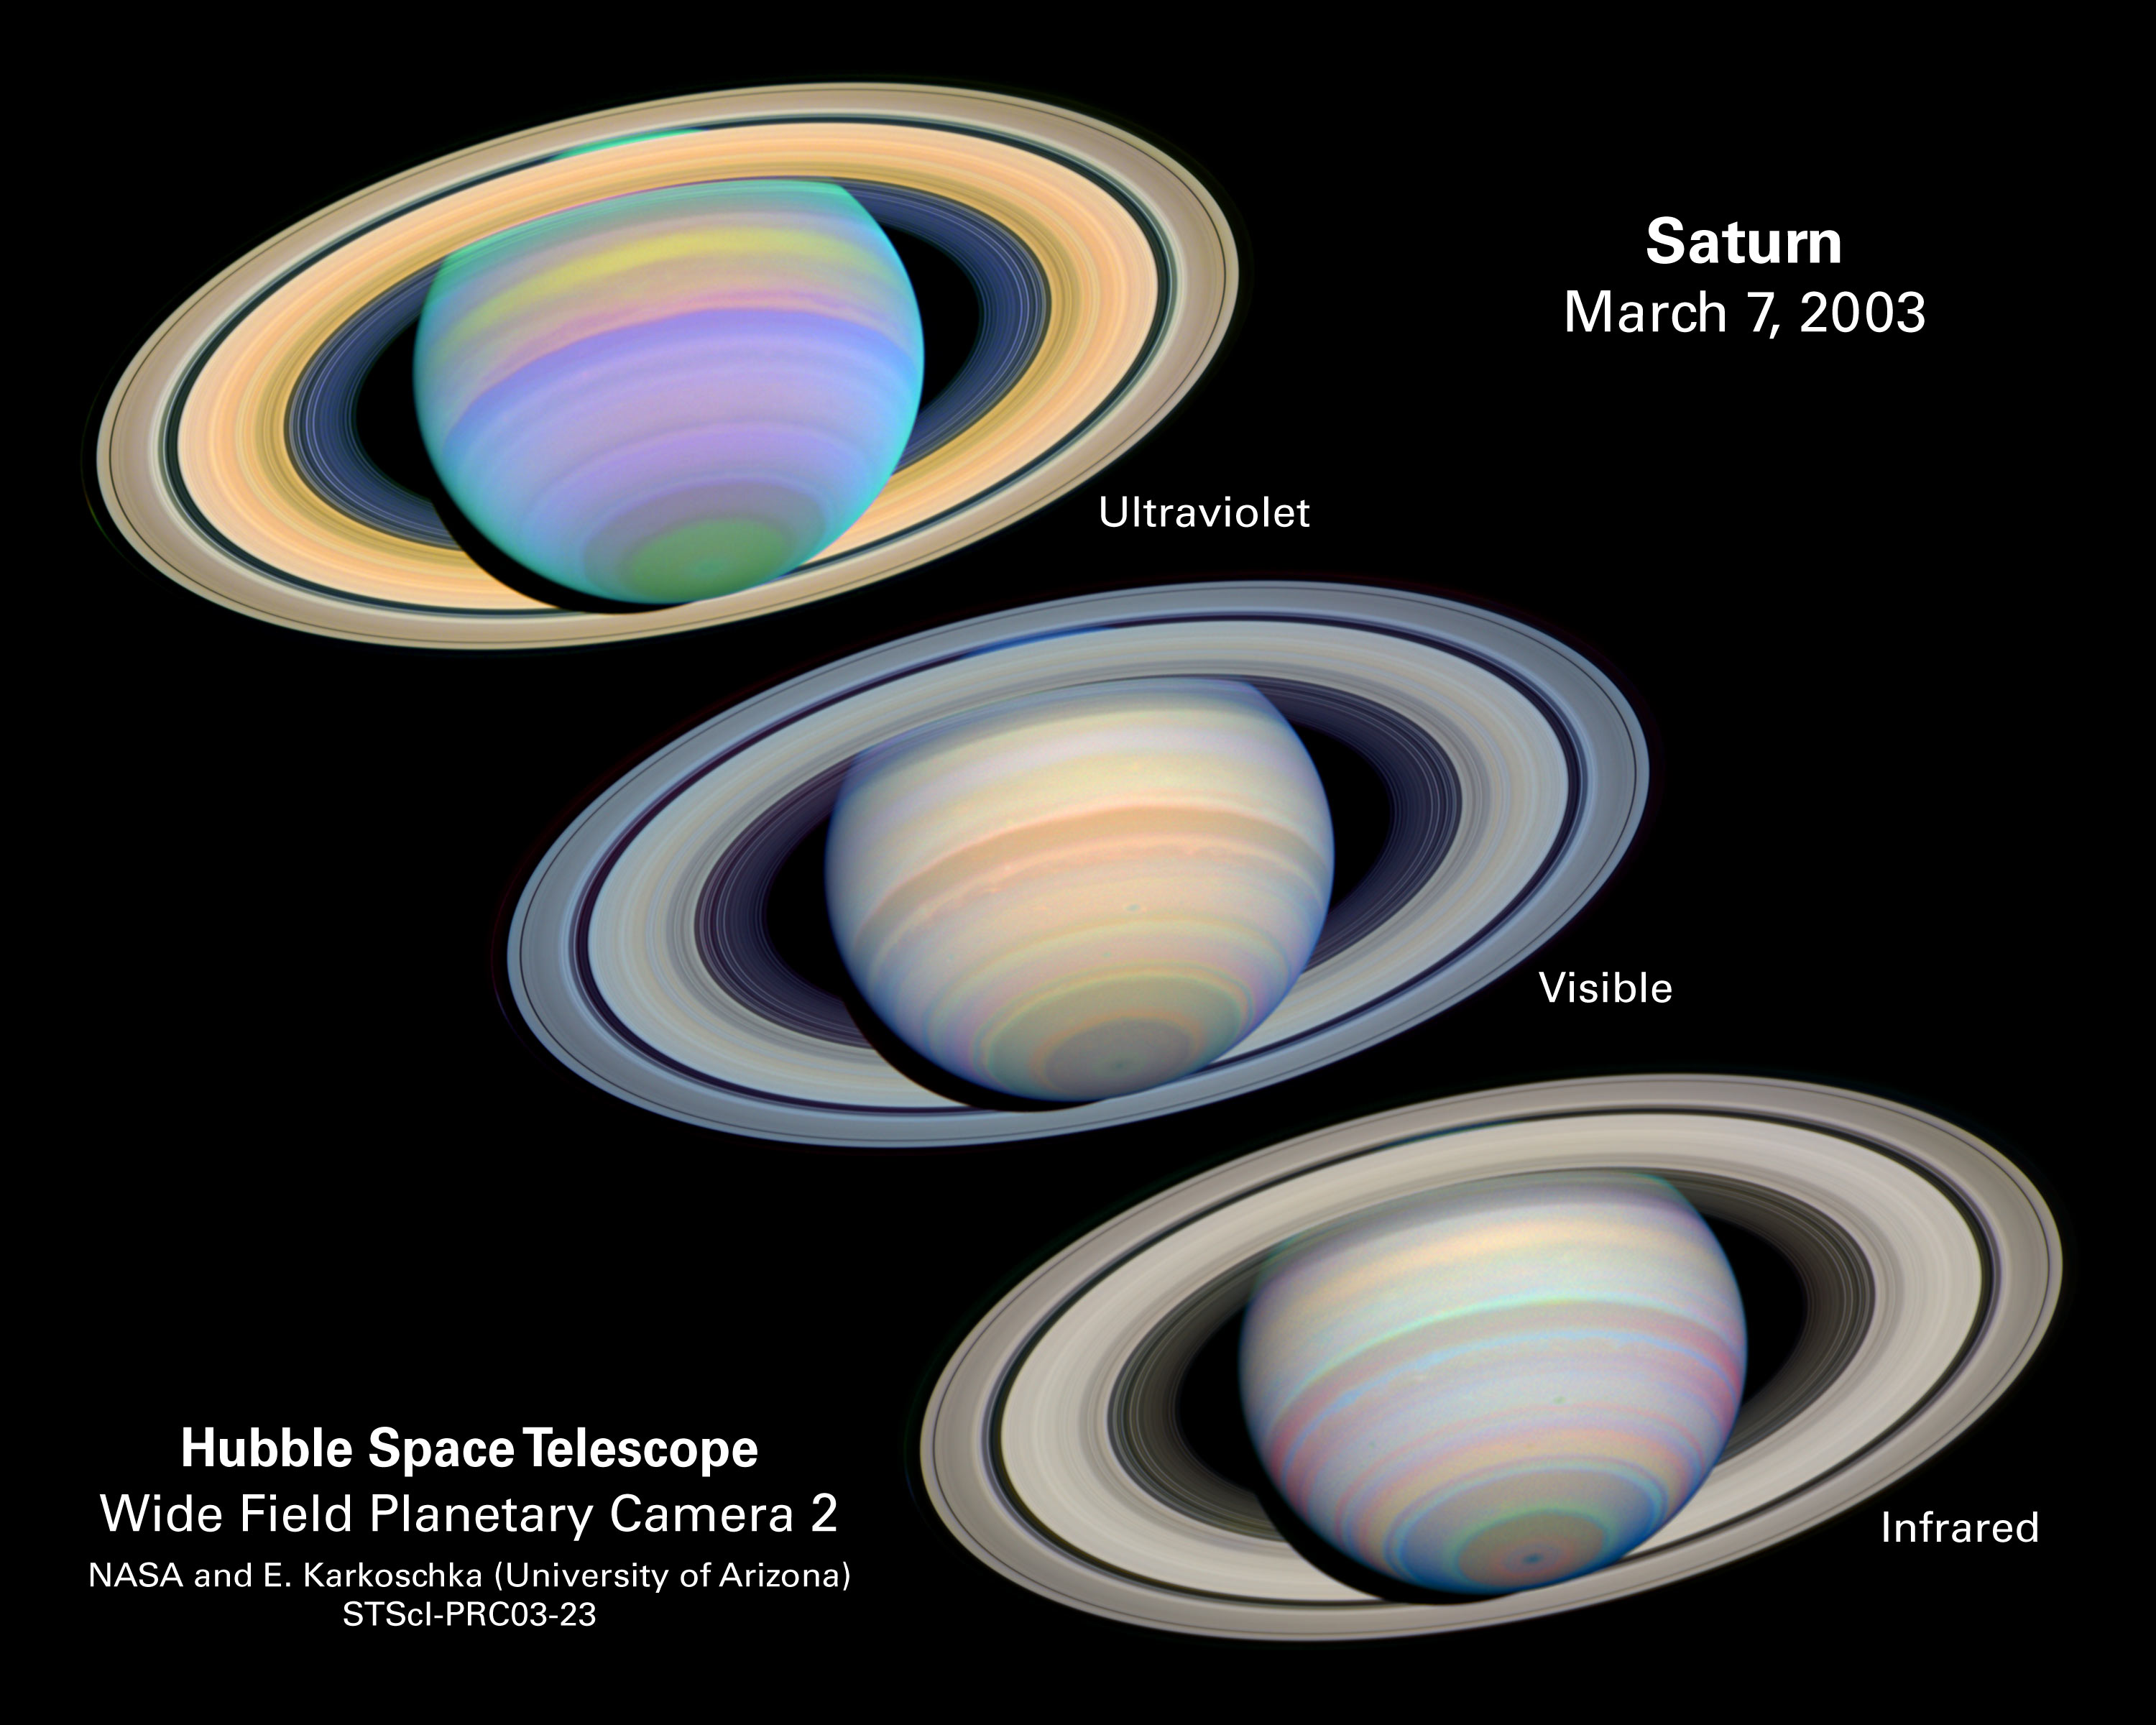

The Slant on Saturn's Rings

This is a series of images of Saturn, as seen at many different wavelengths, when the planet's rings were at a maximum tilt of 27 degrees toward Earth. Saturn experiences seasonal tilts away from and toward the Sun, much the same way Earth does. This happens over the course of its 29.5-year orbit. This means that approximately every 30 years, Earth observers can catch their best glimpse of Saturn's South Pole and the southern side of the planet's rings. Between March and April 2003, researchers took full advantage to study the gas giant at maximum tilt. They used NASA/ESA Hubble Space Telescope to capture detailed images of Saturn's Southern Hemisphere and the southern face of its rings.

Credit: NASA/ESA and E. Karkoschka (University of Arizona)